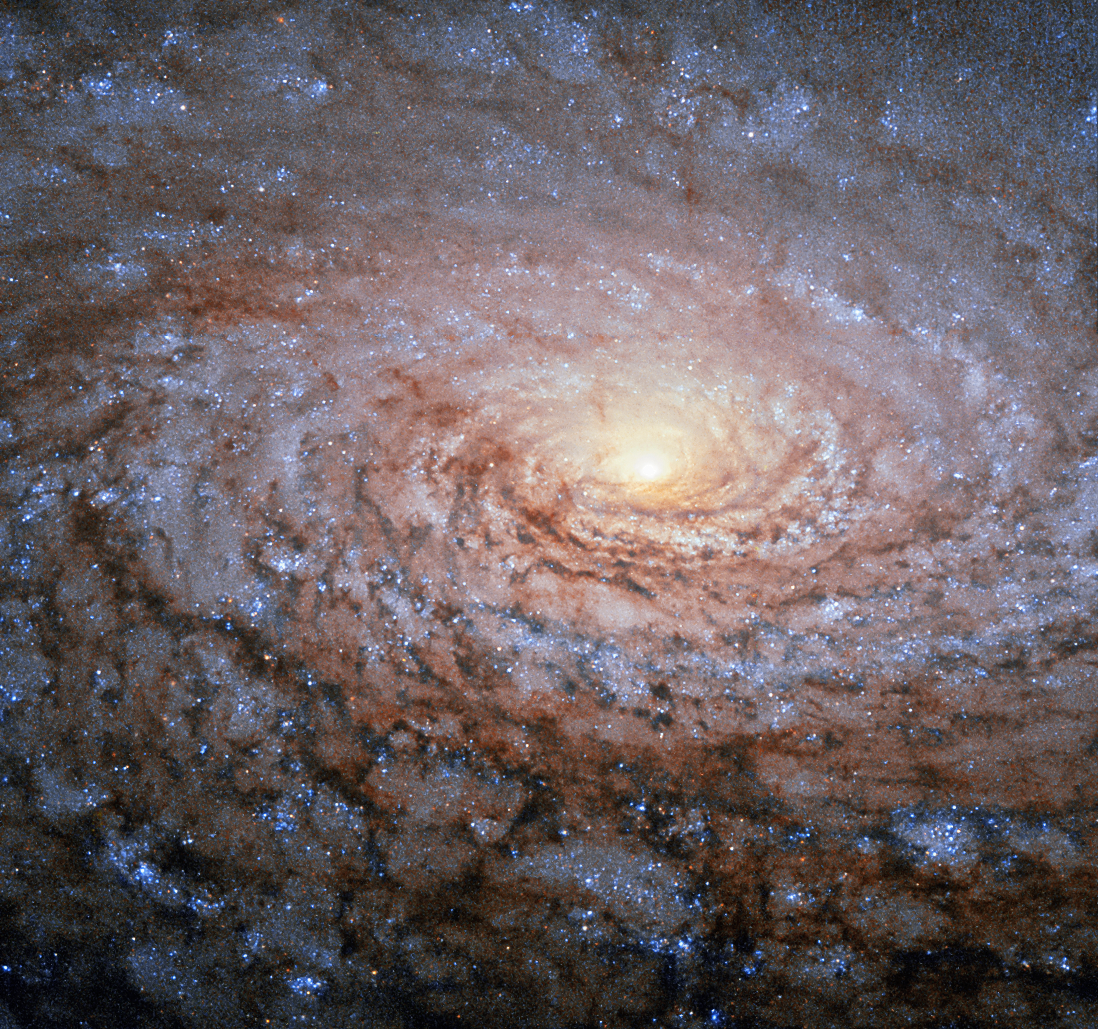

A galactic sunflower

The arrangement of the spiral arms in the galaxy Messier 63, seen here in a new image from the NASA/ESA Hubble Space Telescope, recall the pattern at the centre of a sunflower. So the nickname for this cosmic object — the Sunflower Galaxy — is no coincidence.

Discovered by Pierre Mechain in 1779, the galaxy later made it as the 63rd entry into fellow French astronomer Charles Messier’s famous catalogue, published in 1781. The two astronomers spotted the Sunflower Galaxy’s glow in the small, northern constellation Canes Venatici (the Hunting Dogs). We now know this galaxy is about 27 million light-years away and belongs to the M51 Group — a group of galaxies, named after its brightest member, Messier 51, another spiral-shaped galaxy dubbed the Whirlpool Galaxy.

Galactic arms, sunflowers and whirlpools are only a few examples of nature’s apparent preference for spirals. For galaxies like Messier 63 the winding arms shine bright because of the presence of recently formed, blue–white giant stars, readily seen in this Hubble image.

Credit: ESA/Hubble & NASA